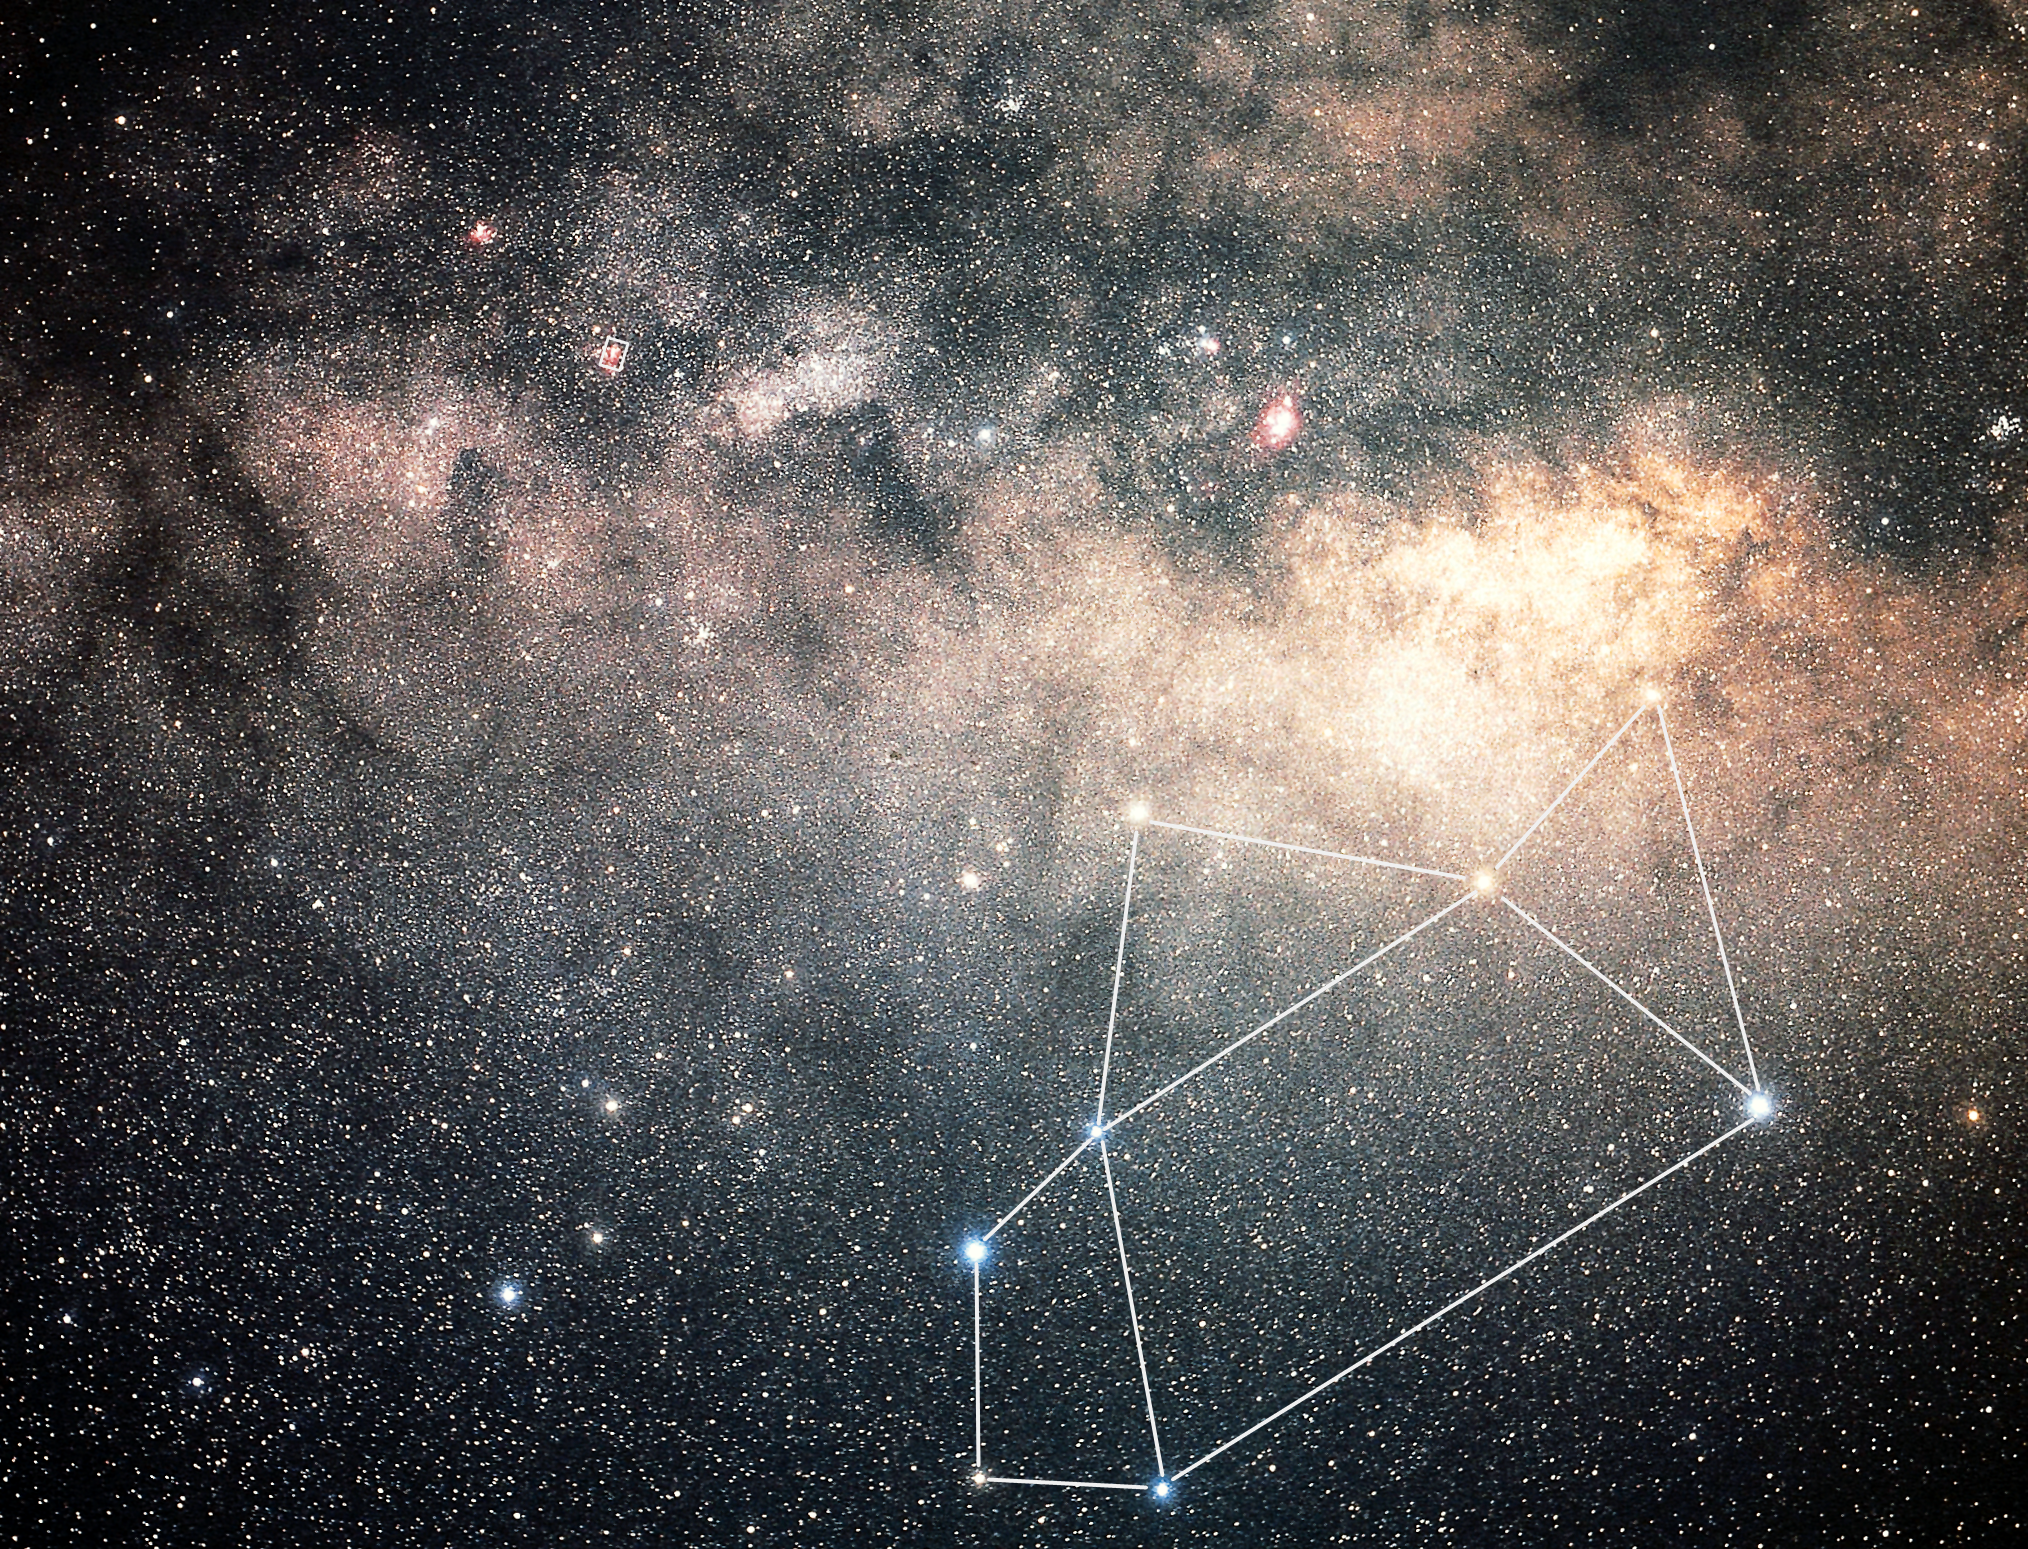

Sagittarius constellation (ground-based image)

This photo was taken by the Japanese astrophotographer Akira Fujii and shows a full view of the constellation of Sagittarius, also known as the 'Teapot'. In the bottom right corner, the Omega or Swan Nebula (also known as Messier 17) is marked. The box corresponds to the NOAO image of this nebula.

Credit: Akira Fujii